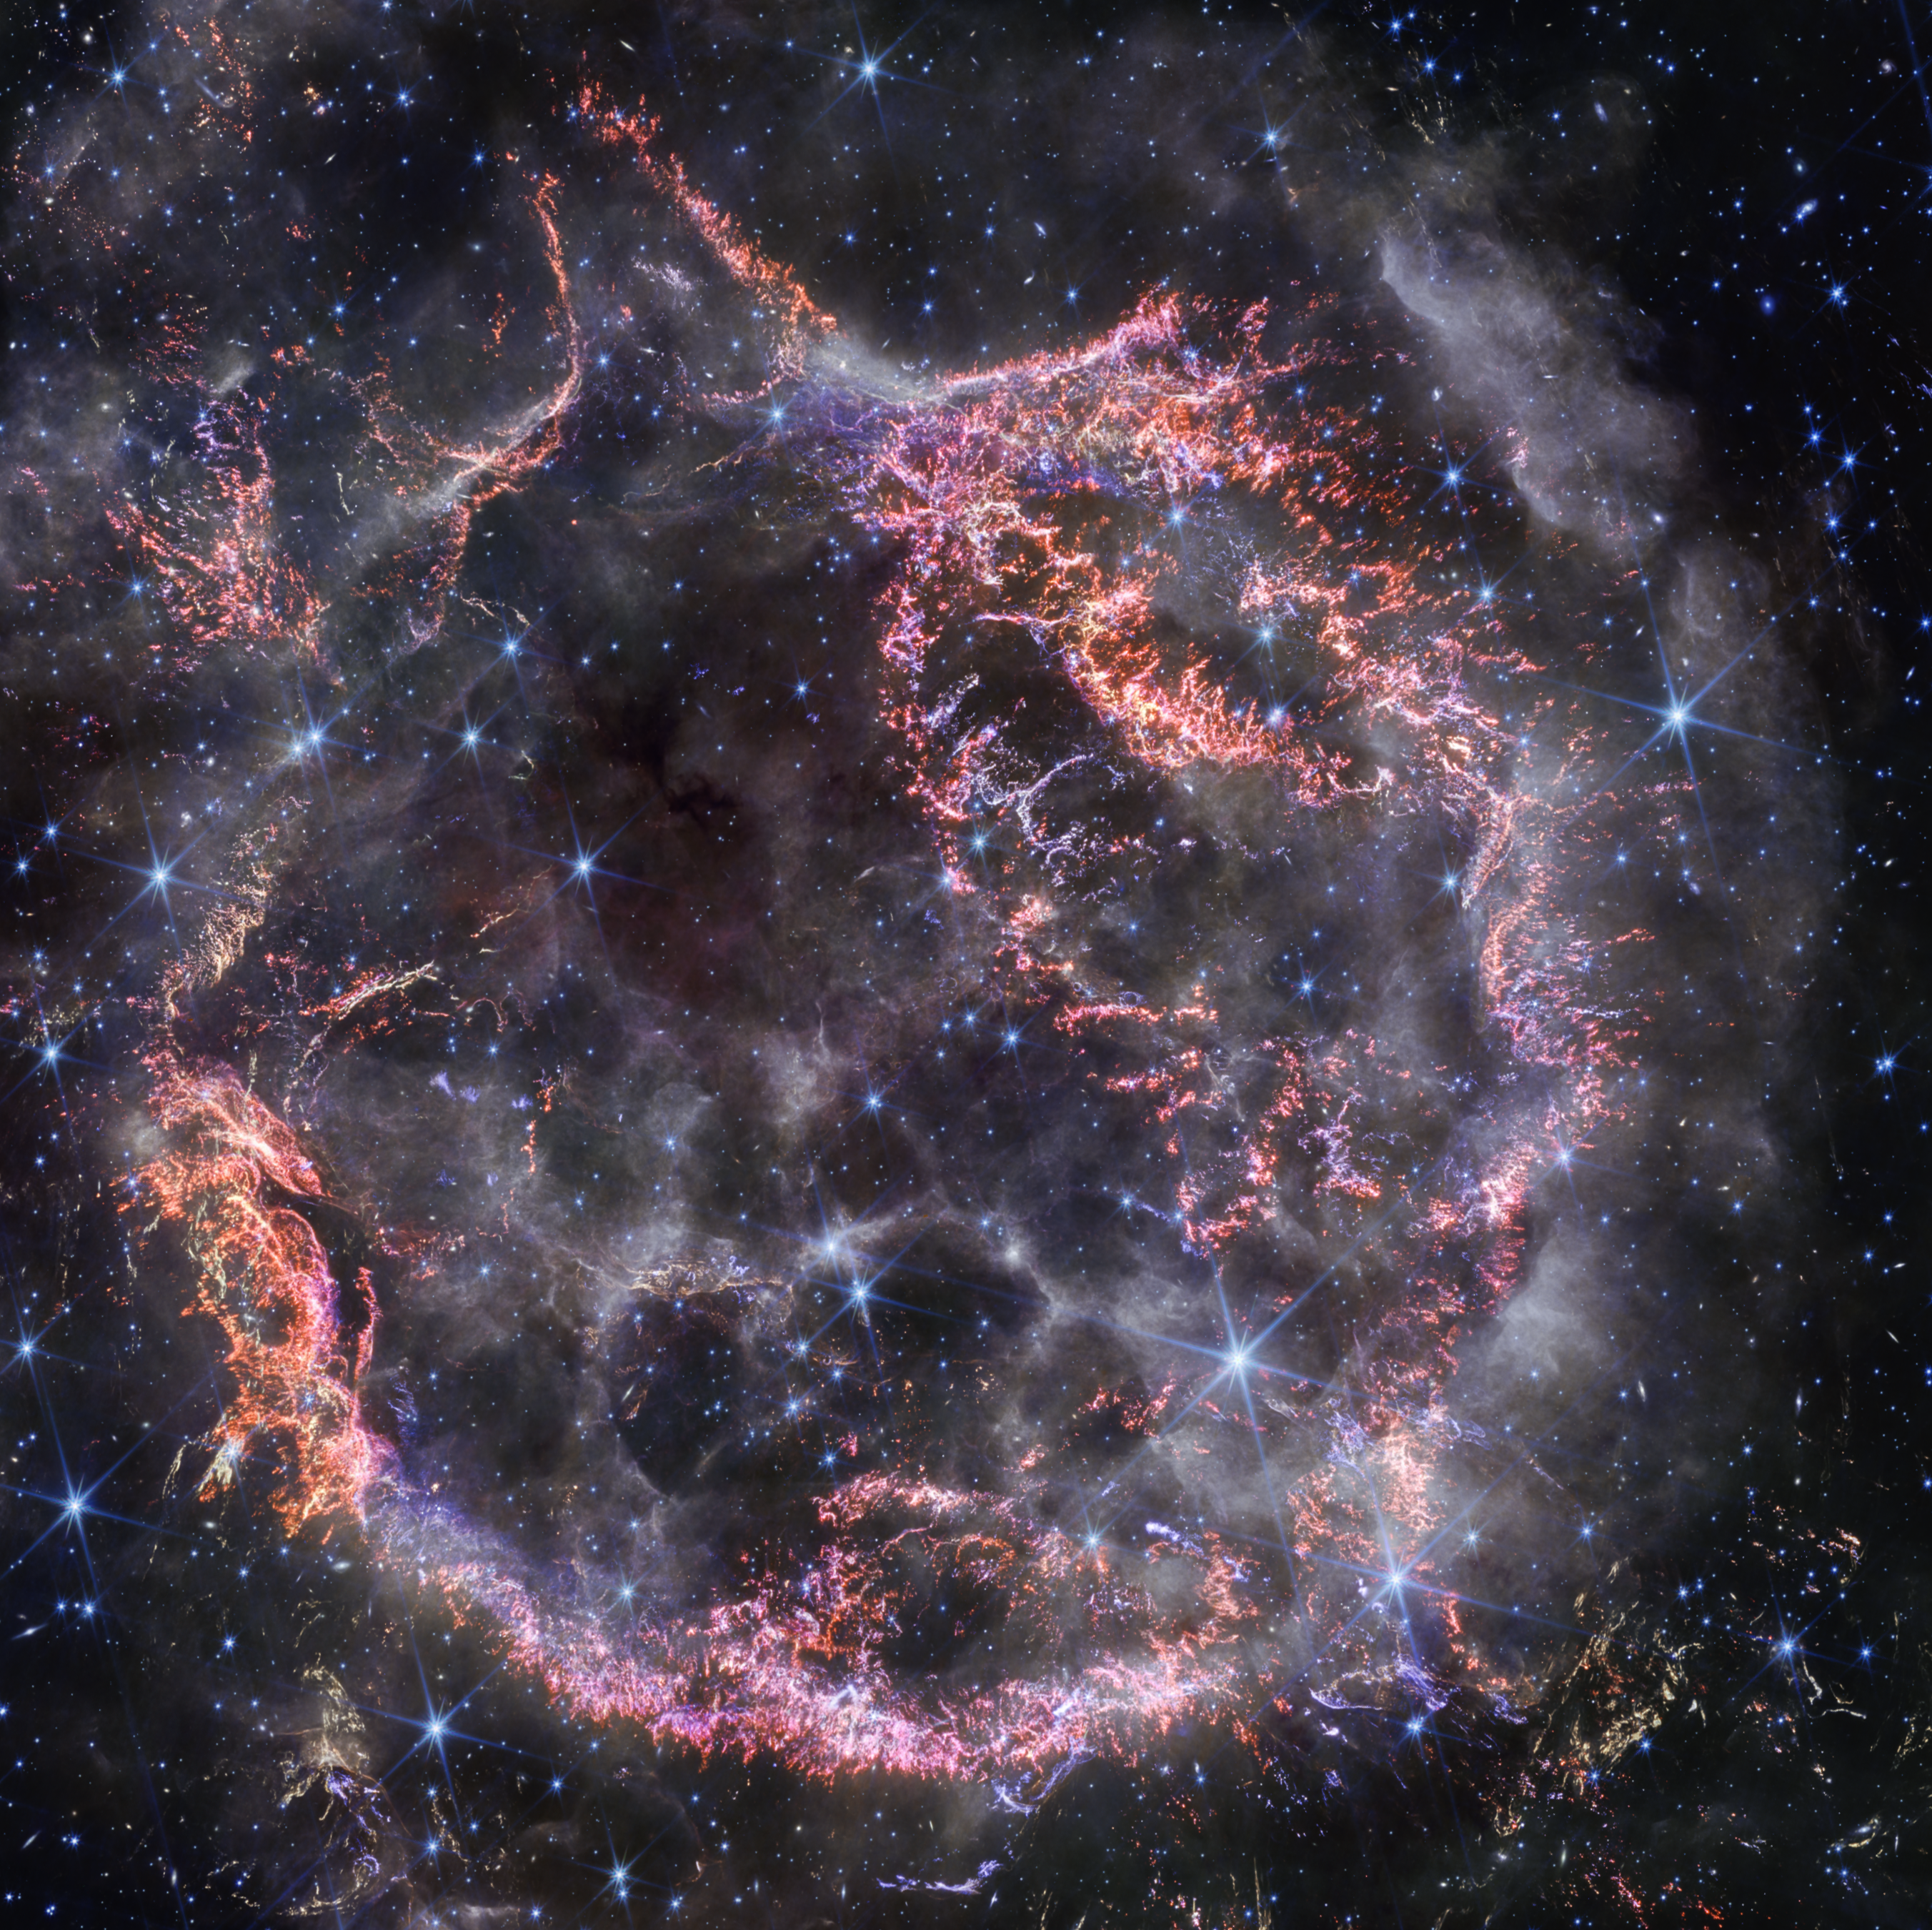

Cas A (NIRCam image)

A new high-definition image from the NASA/ESA/CSA James Webb Space Telescope’s NIRCam (Near-Infrared Camera) release in December 2023 unveils intricate details of supernova remnant Cassiopeia A (Cas A), and shows the expanding shell of material slamming into the gas shed by the star before it exploded.

The most noticeable colours in Webb’s newest image are clumps of bright orange and light pink that make up the inner shell of the supernova remnant. These tiny knots of gas, comprised of sulphur, oxygen, argon, and neon from the star itself, are only detectable by NIRCam’s exquisite resolution, and give researchers a hint at how the dying star shattered like glass when it exploded.

The outskirts of the main inner shell looks like smoke from a campfire. This marks where ejected material from the exploded star is ramming into surrounding circumstellar material. Researchers say this white colour is light from synchrotron radiation, which is generated by charged particles travelling at extremely high speeds and spiralling around magnetic field lines.

There are also several light echoes visible in this image, most notably in the bottom right corner. This is where light from the star’s long-ago explosion has reached, and is warming, distant dust, which glows as it cools down.

Credit: NASA, ESA, CSA, STScI, D. Milisavljevic (Purdue University), T. Temim (Princeton University), I. De Looze (University of Gent)